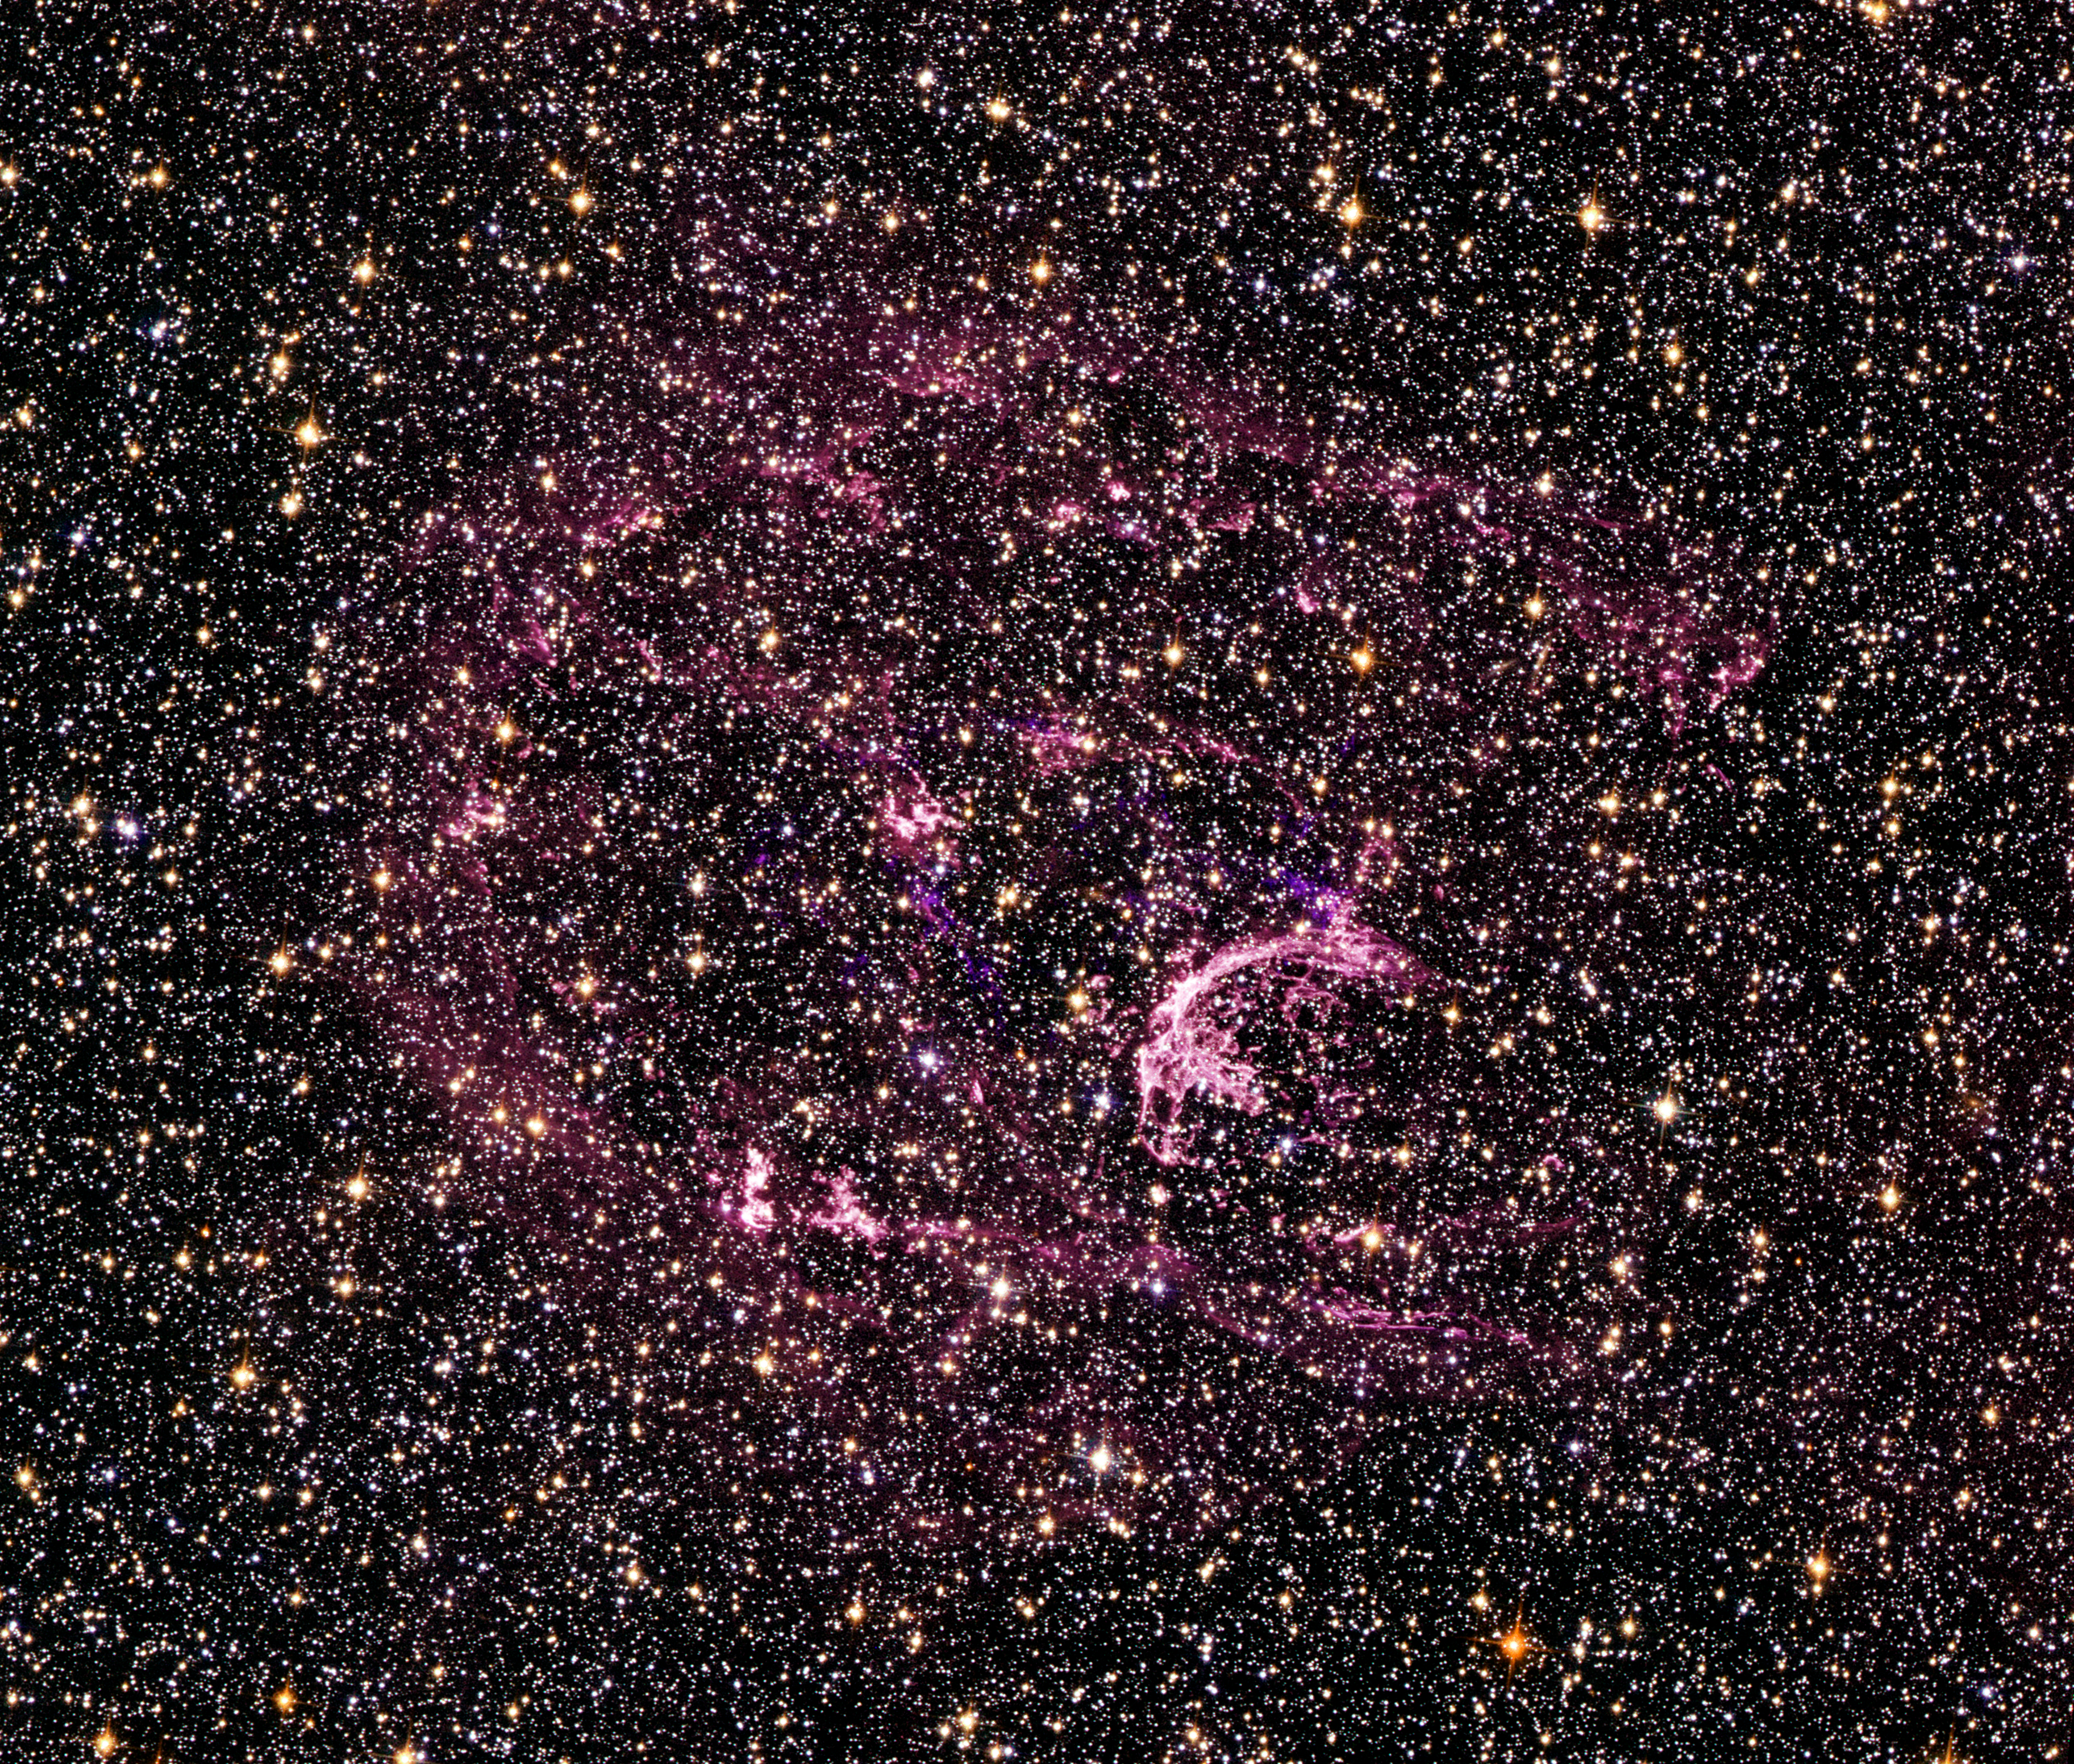

Probing the tattered remains of the supernova remnant N132D

The wispy, glowing, magenta structures in this NASA/ESA Hubble Space Telescope image are the remains of a star 10 to 15 times the mass of the Sun, which we would have seen exploding as a supernova 3000 years ago. The remnant's fast-moving gas is ploughing into the surrounding gas of the galaxy, creating a supersonic shock wave in the surrounding medium and making the material glow.

The Hubble visible-light image reveals, deep within the remnant, a crescent-shaped cloud of pink emission from hydrogen gas and soft purple wisps that correspond to regions of glowing oxygen. A dense background of colourful stars is also visible.

Probing this tattered gaseous relic, the newly installed Cosmic Origins Spectrograph (COS) aboard the NASA/ESA Hubble Space Telescope detected pristine gas ejected by the doomed star that has not yet mixed with the gas in the interstellar medium. The supernova remnant, called N132D, resides in the Large Magellanic Cloud, a small companion galaxy of the Milky Way located 170 000 light-years away. The resulting spectrum, taken in ultraviolet light, shows glowing oxygen and carbon in the remnant.

These results allow astronomers to better understand why some stars form an abundance of certain elements, like oxygen, but not others.

Ultraviolet light is blocked by Earth's atmosphere, so the observation of N132D in the ultraviolet requires the use of the space-borne Hubble. The broadest range of spectral signatures of the glowing gas appear in the ultraviolet, allowing astronomers to determine the quantities, or abundances, of key elements such as oxygen, as well as elements whose abundances cannot be traced from visible-light images, including carbon, magnesium and silicon. Previous ultraviolet instruments on Hubble were not sensitive enough to distinguish between the unmixed ejecta, fresh from the supernova, and the "shocked" gas of the surrounding interstellar medium.

Supernova remnants provide a rare opportunity to search for the material hidden deep inside a star. This in turn yields information on how stars evolve and how they manufacture chemicals in their interiors. Supernova explosions also enrich the interstellar medium with new chemical elements, which are incorporated into future generations of stars.

The COS observations were made on 10 August 2009. COS was installed by NASA astronauts in May 2009, during the Servicing Mission to upgrade and repair the 19-year-old Hubble.

The visible-light image was taken on 2 August 2009 with Hubble's new Wide Field Camera 3 (WFC3). A filter that isolates emission from sulphur was combined with archival data from the Advanced Camera for Surveys (ACS). The ACS data include colour filters that sample starlight in the blue, green and red portions of the spectrum, as well as the pink emission from glowing hydrogen gas.

These Hubble observations of the N132D are part of the Hubble Servicing Mission 4 Early Release Observations.

Credit: NASA, ESA and the Hubble SM4 ERO Team